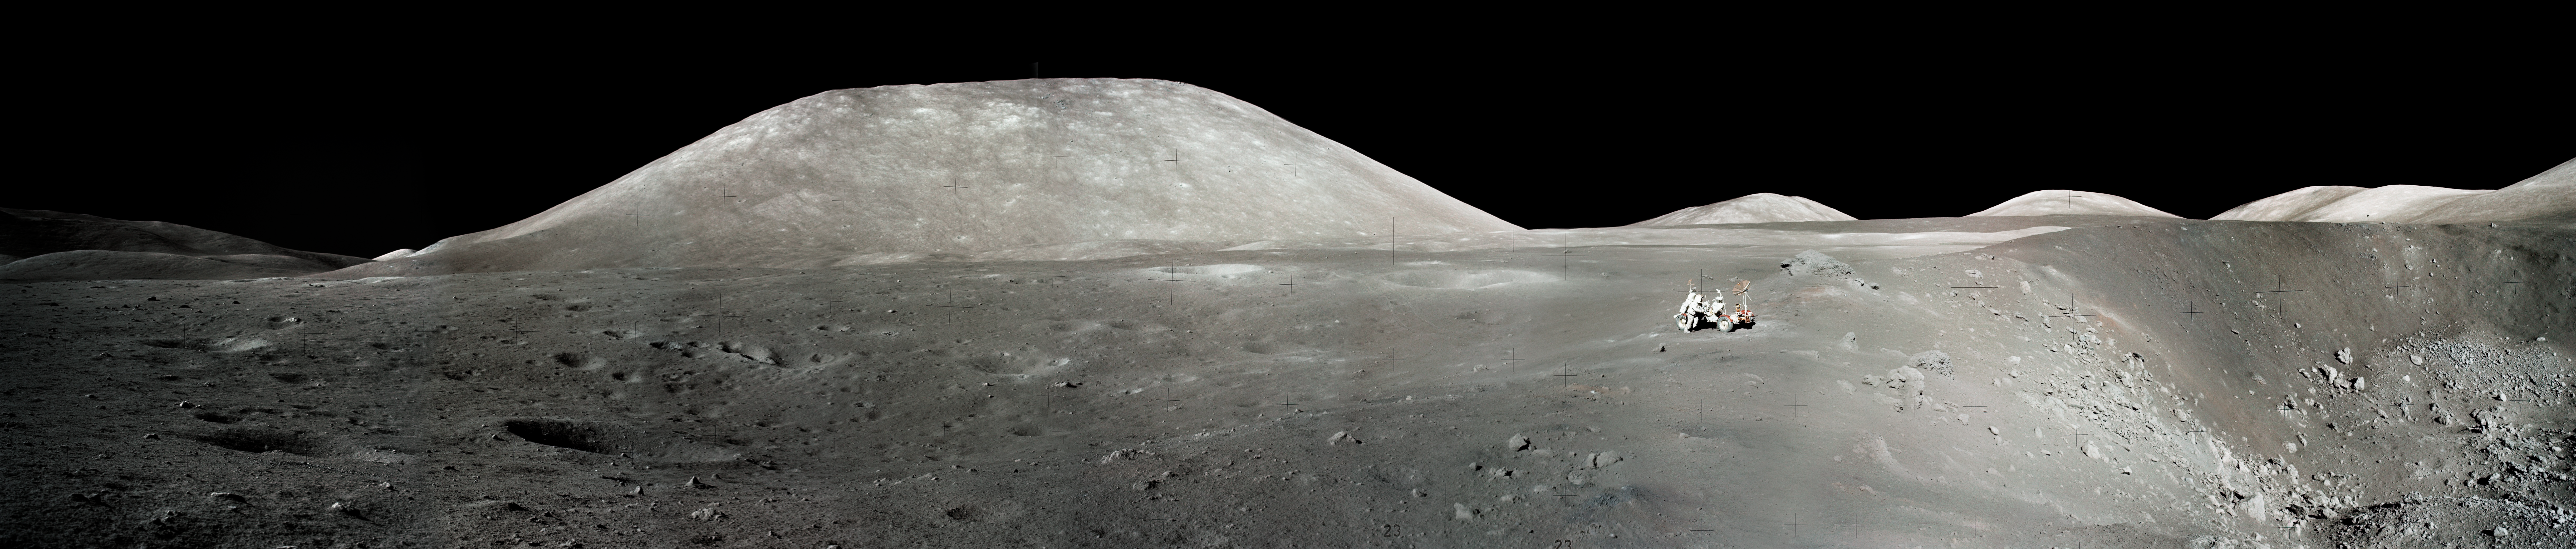

An Astronaut's Snapshot of the Moon

Apollo 17 astronauts Dr. H. Jack Schmitt and Gene Cernan took this image of the Moon's Taurus-Littrow valley. The view shows the lunar roving vehicle near the rim of Shorty crater. In the distance are the mountain-like massifs that define the Taurus-Littrow valley. This region marks the last time - December 1972 - that humans walked and drove on the Moon's surface.

Credit: NASA, ESA, and J. Garvin (NASA/GSFC)